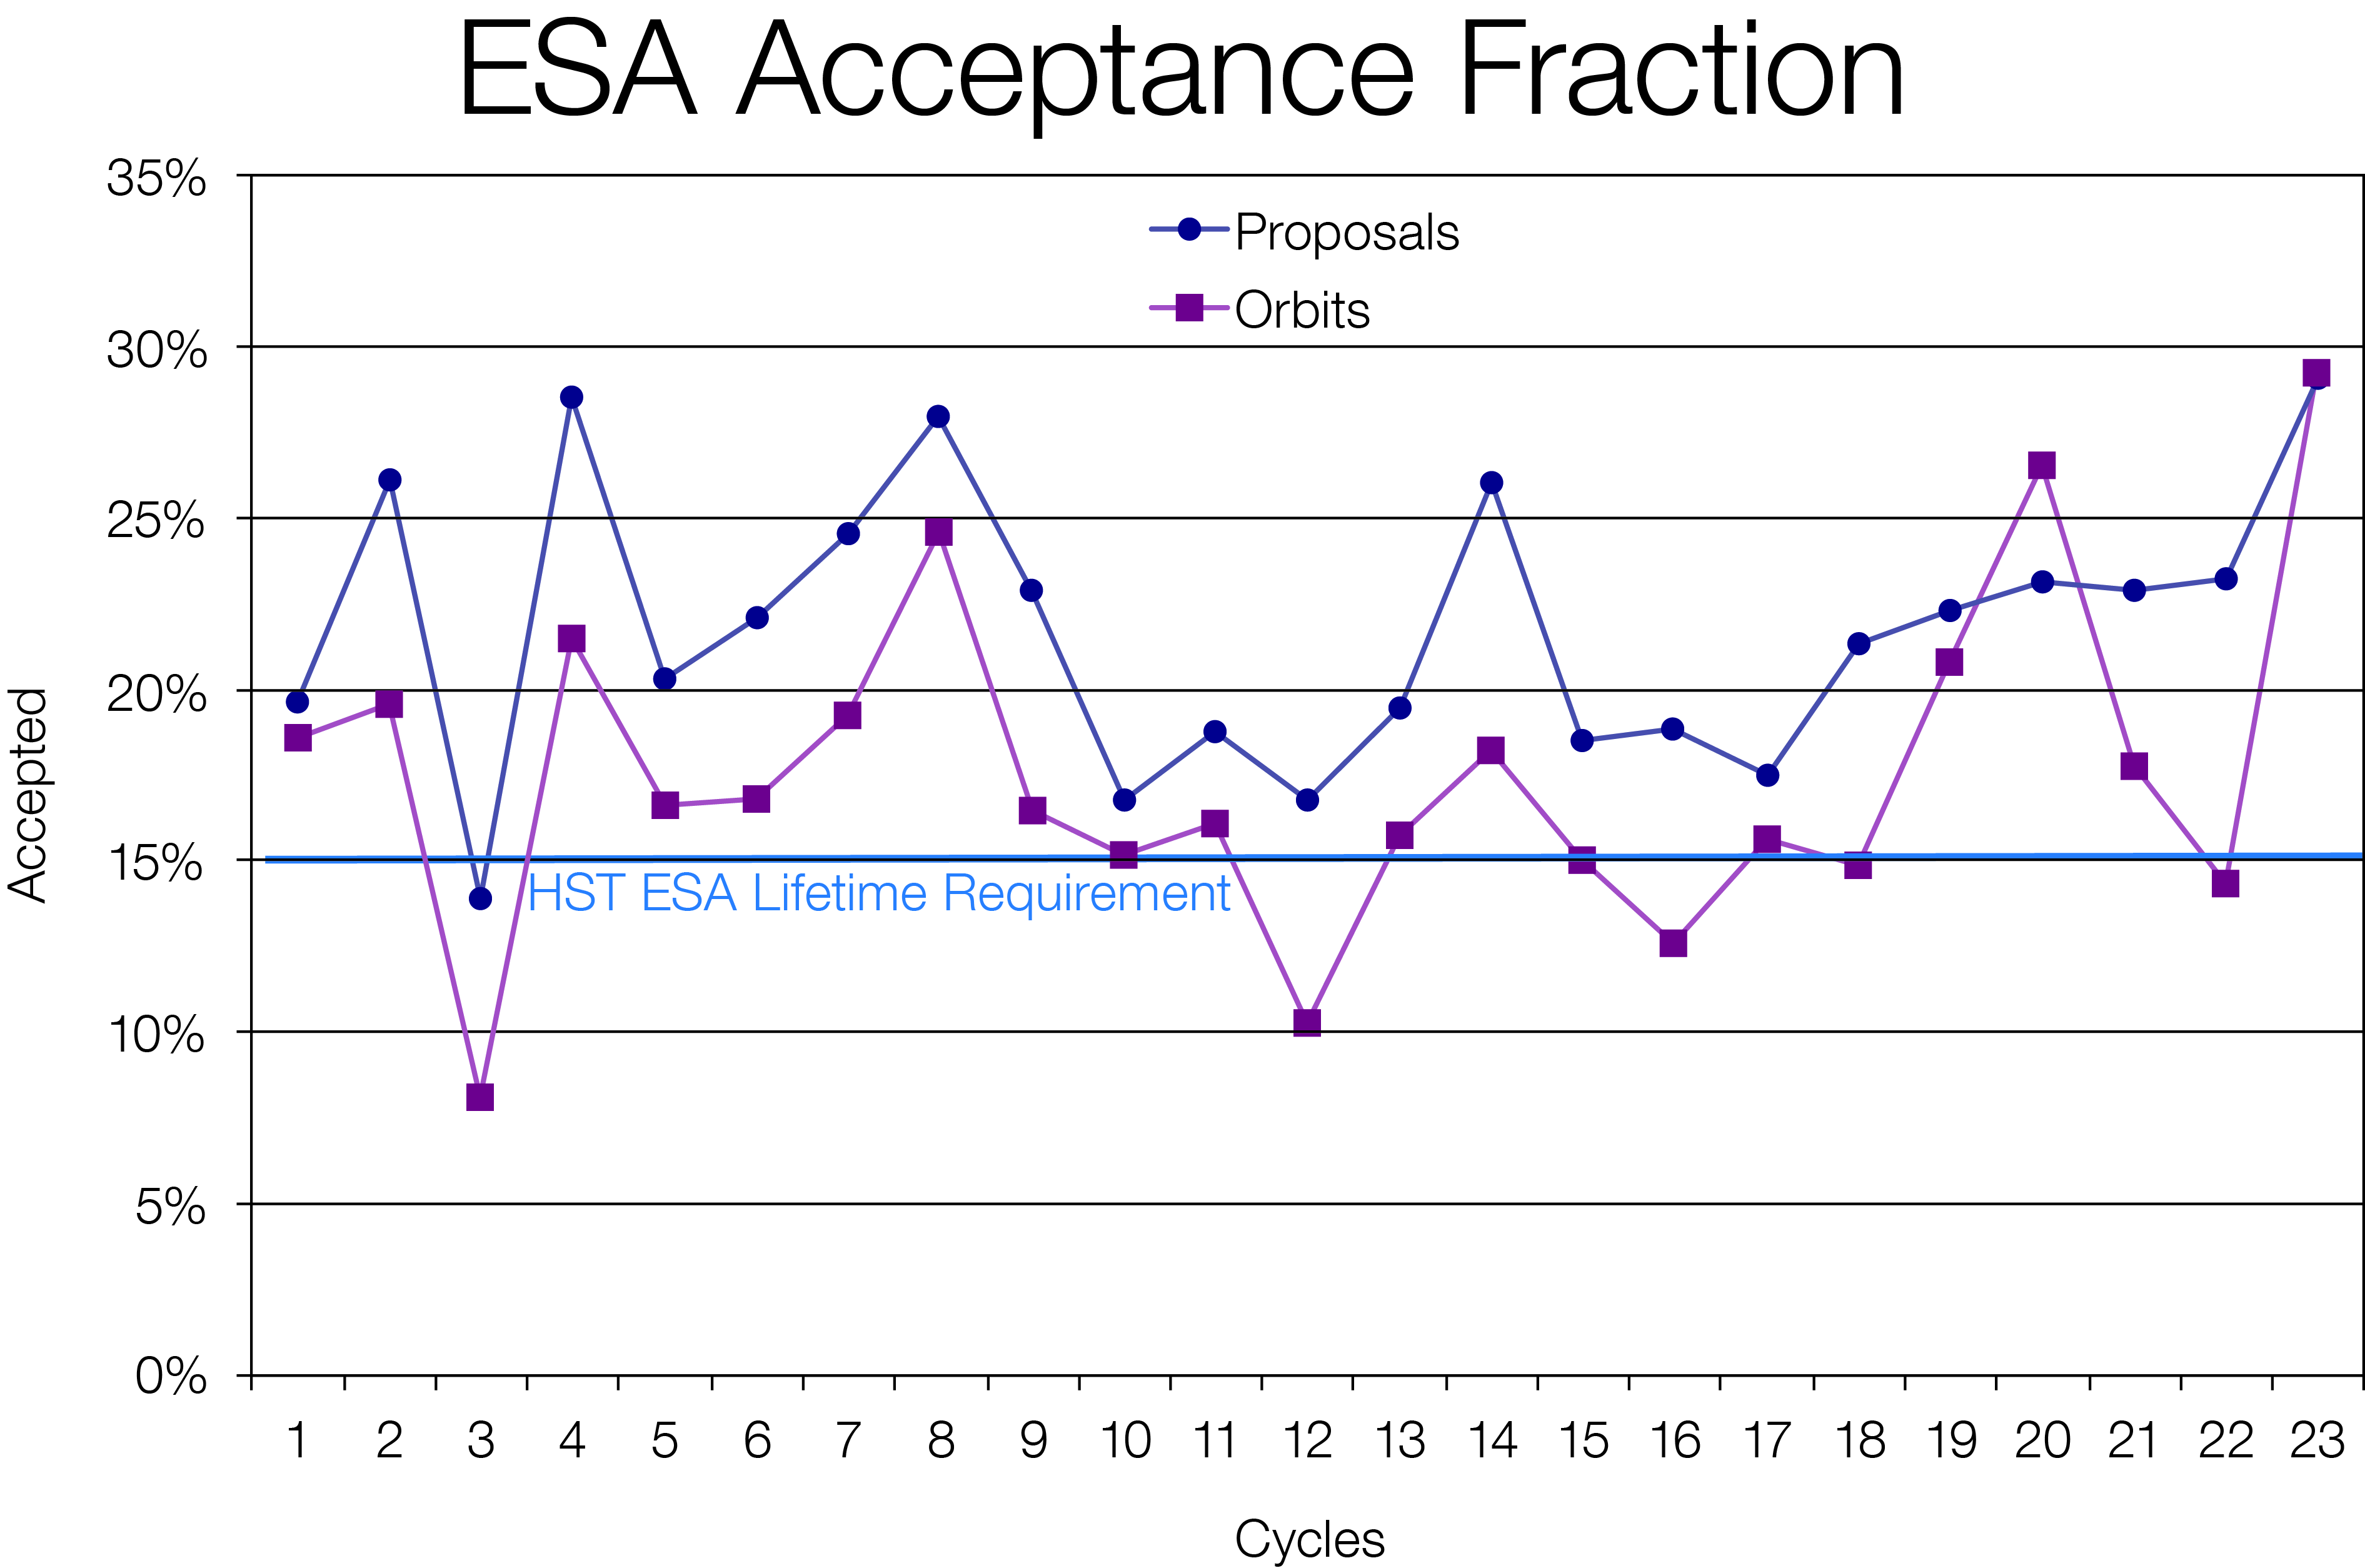

Time allocation results

This figure shows the rate of success in receiving time on Hubble for PIs from ESA member states as a function of cycle.

Credit: ESA